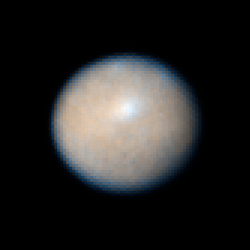

Ceres: 30 December 2003 15:46 UT

Observations of Ceres, the largest known asteroid, have revealed that the object may be a "mini planet", complete with ice water.

Credit: NASA, ESA, J. Parker (Southwest Research Institute), P. Thomas (Cornell University), L. McFadden (University of Maryland, College Park), and M. Mutchler and Z. Levay (STScI)